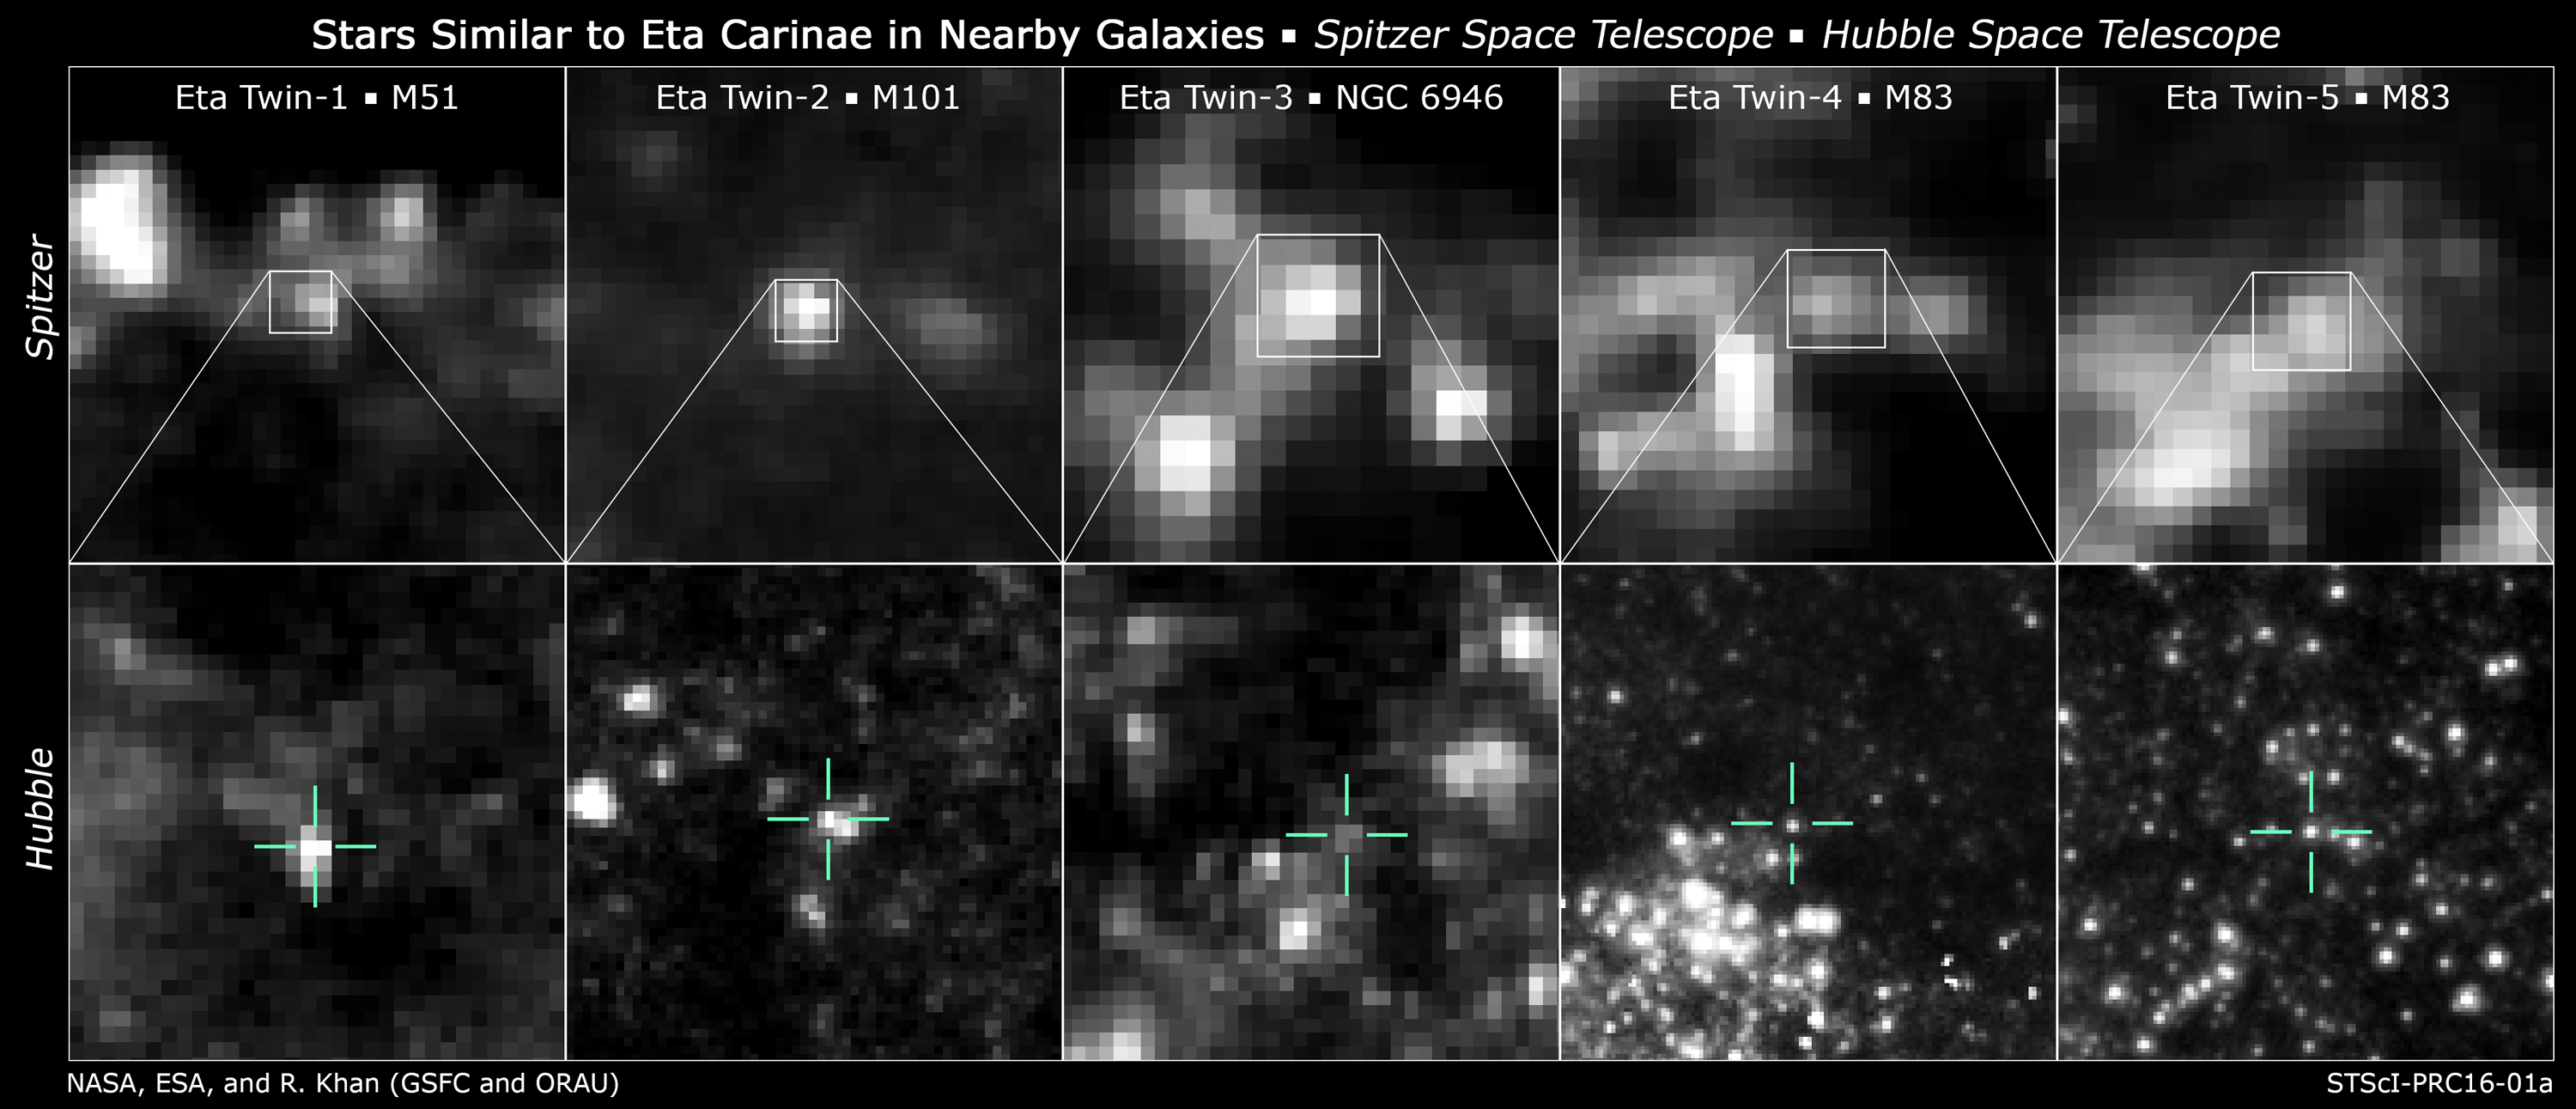

Stars similar to Eta Carinae in nearby galaxies

Researchers found likely Eta twins in four galaxies by comparing the infrared and optical brightness of each candidate source. Infrared images from NASA's Spitzer Space Telescope revealed the presence of warm dust surrounding the stars. Comparing this information with the brightness of each source at optical and near-infrared wavelengths as measured by instruments on the NASA/ESA Hubble Space Telescope, the team was able to identify candidate Eta Carinae-like objects.

Top: 3.6-micron images of candidate Eta twins from Spitzer's IRAC instrument.

Bottom: 800-nanometer images of the same sources from various Hubble instruments.

Credit: NASA, ESA, and R. Khan (GSFC and ORAU)